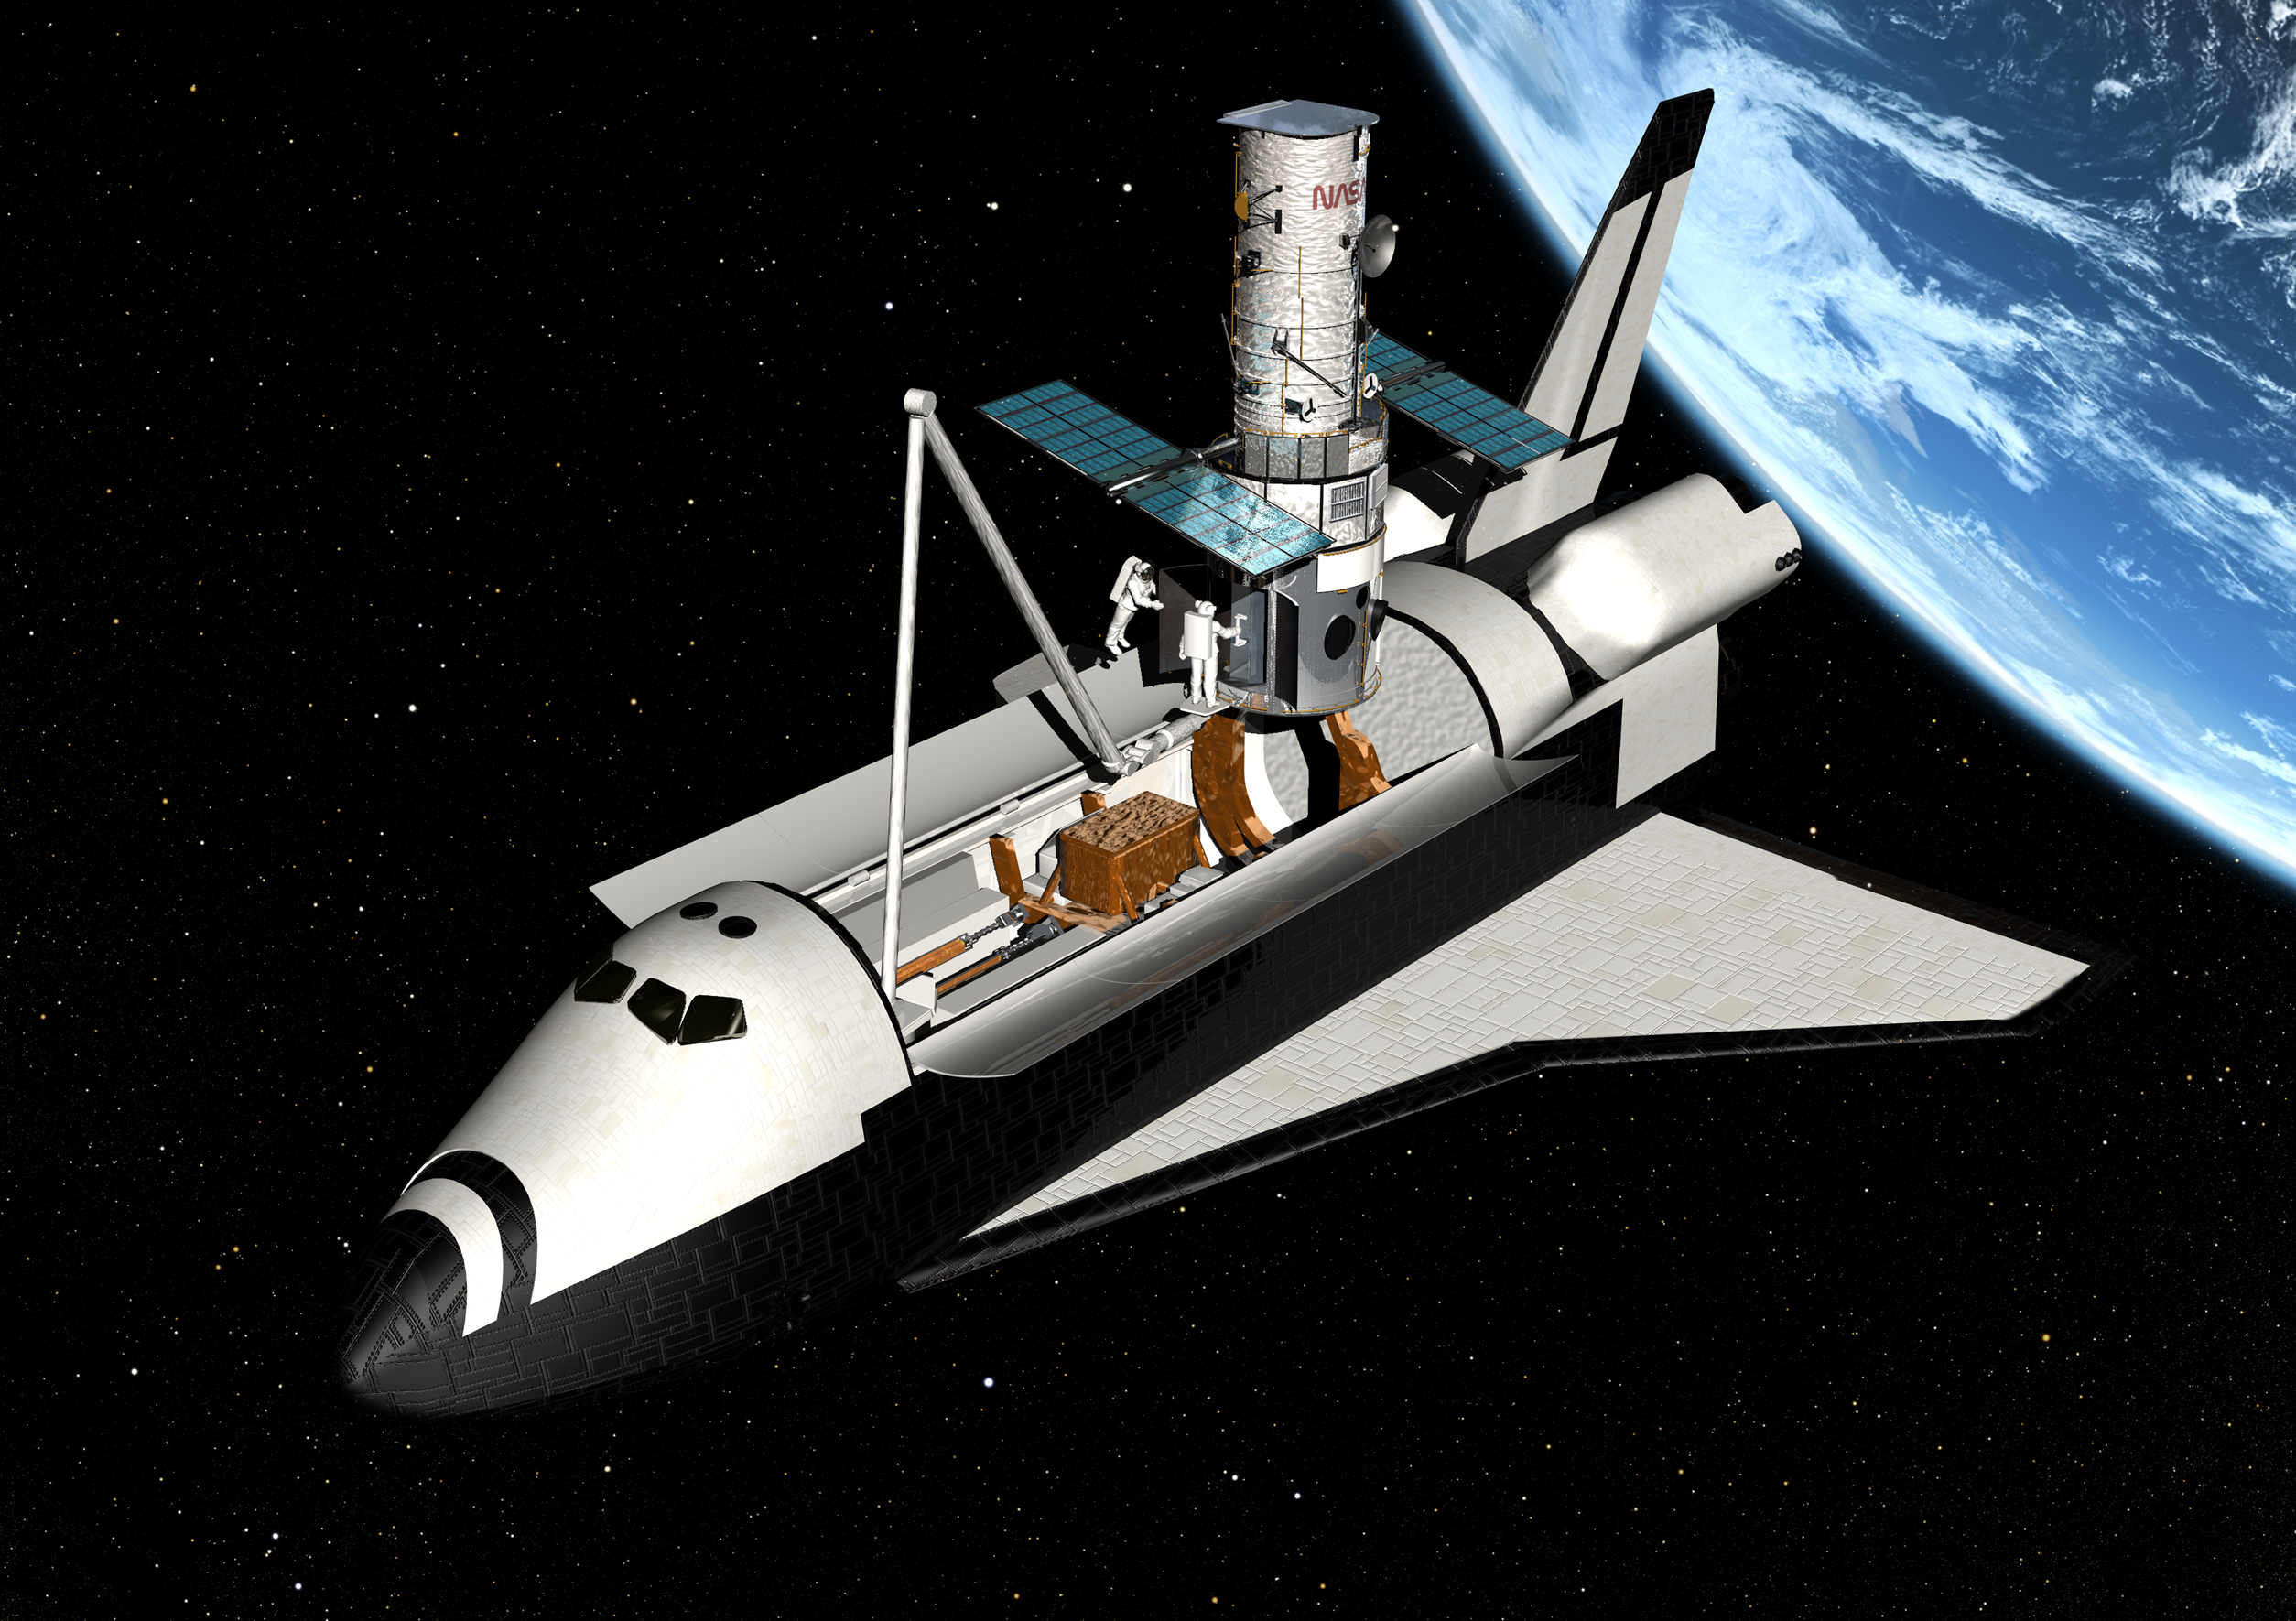

Hubble gets revitalised in new servicing mission

Artist's impression of servicing mission 3B, when the Faint Objects Camera (FOC) was removed and replaced with newer and more powerful instruments designed to greatly increase Hubble's discovery capabilities and extend the longevity of the observatory.

Credit: European Space Agency